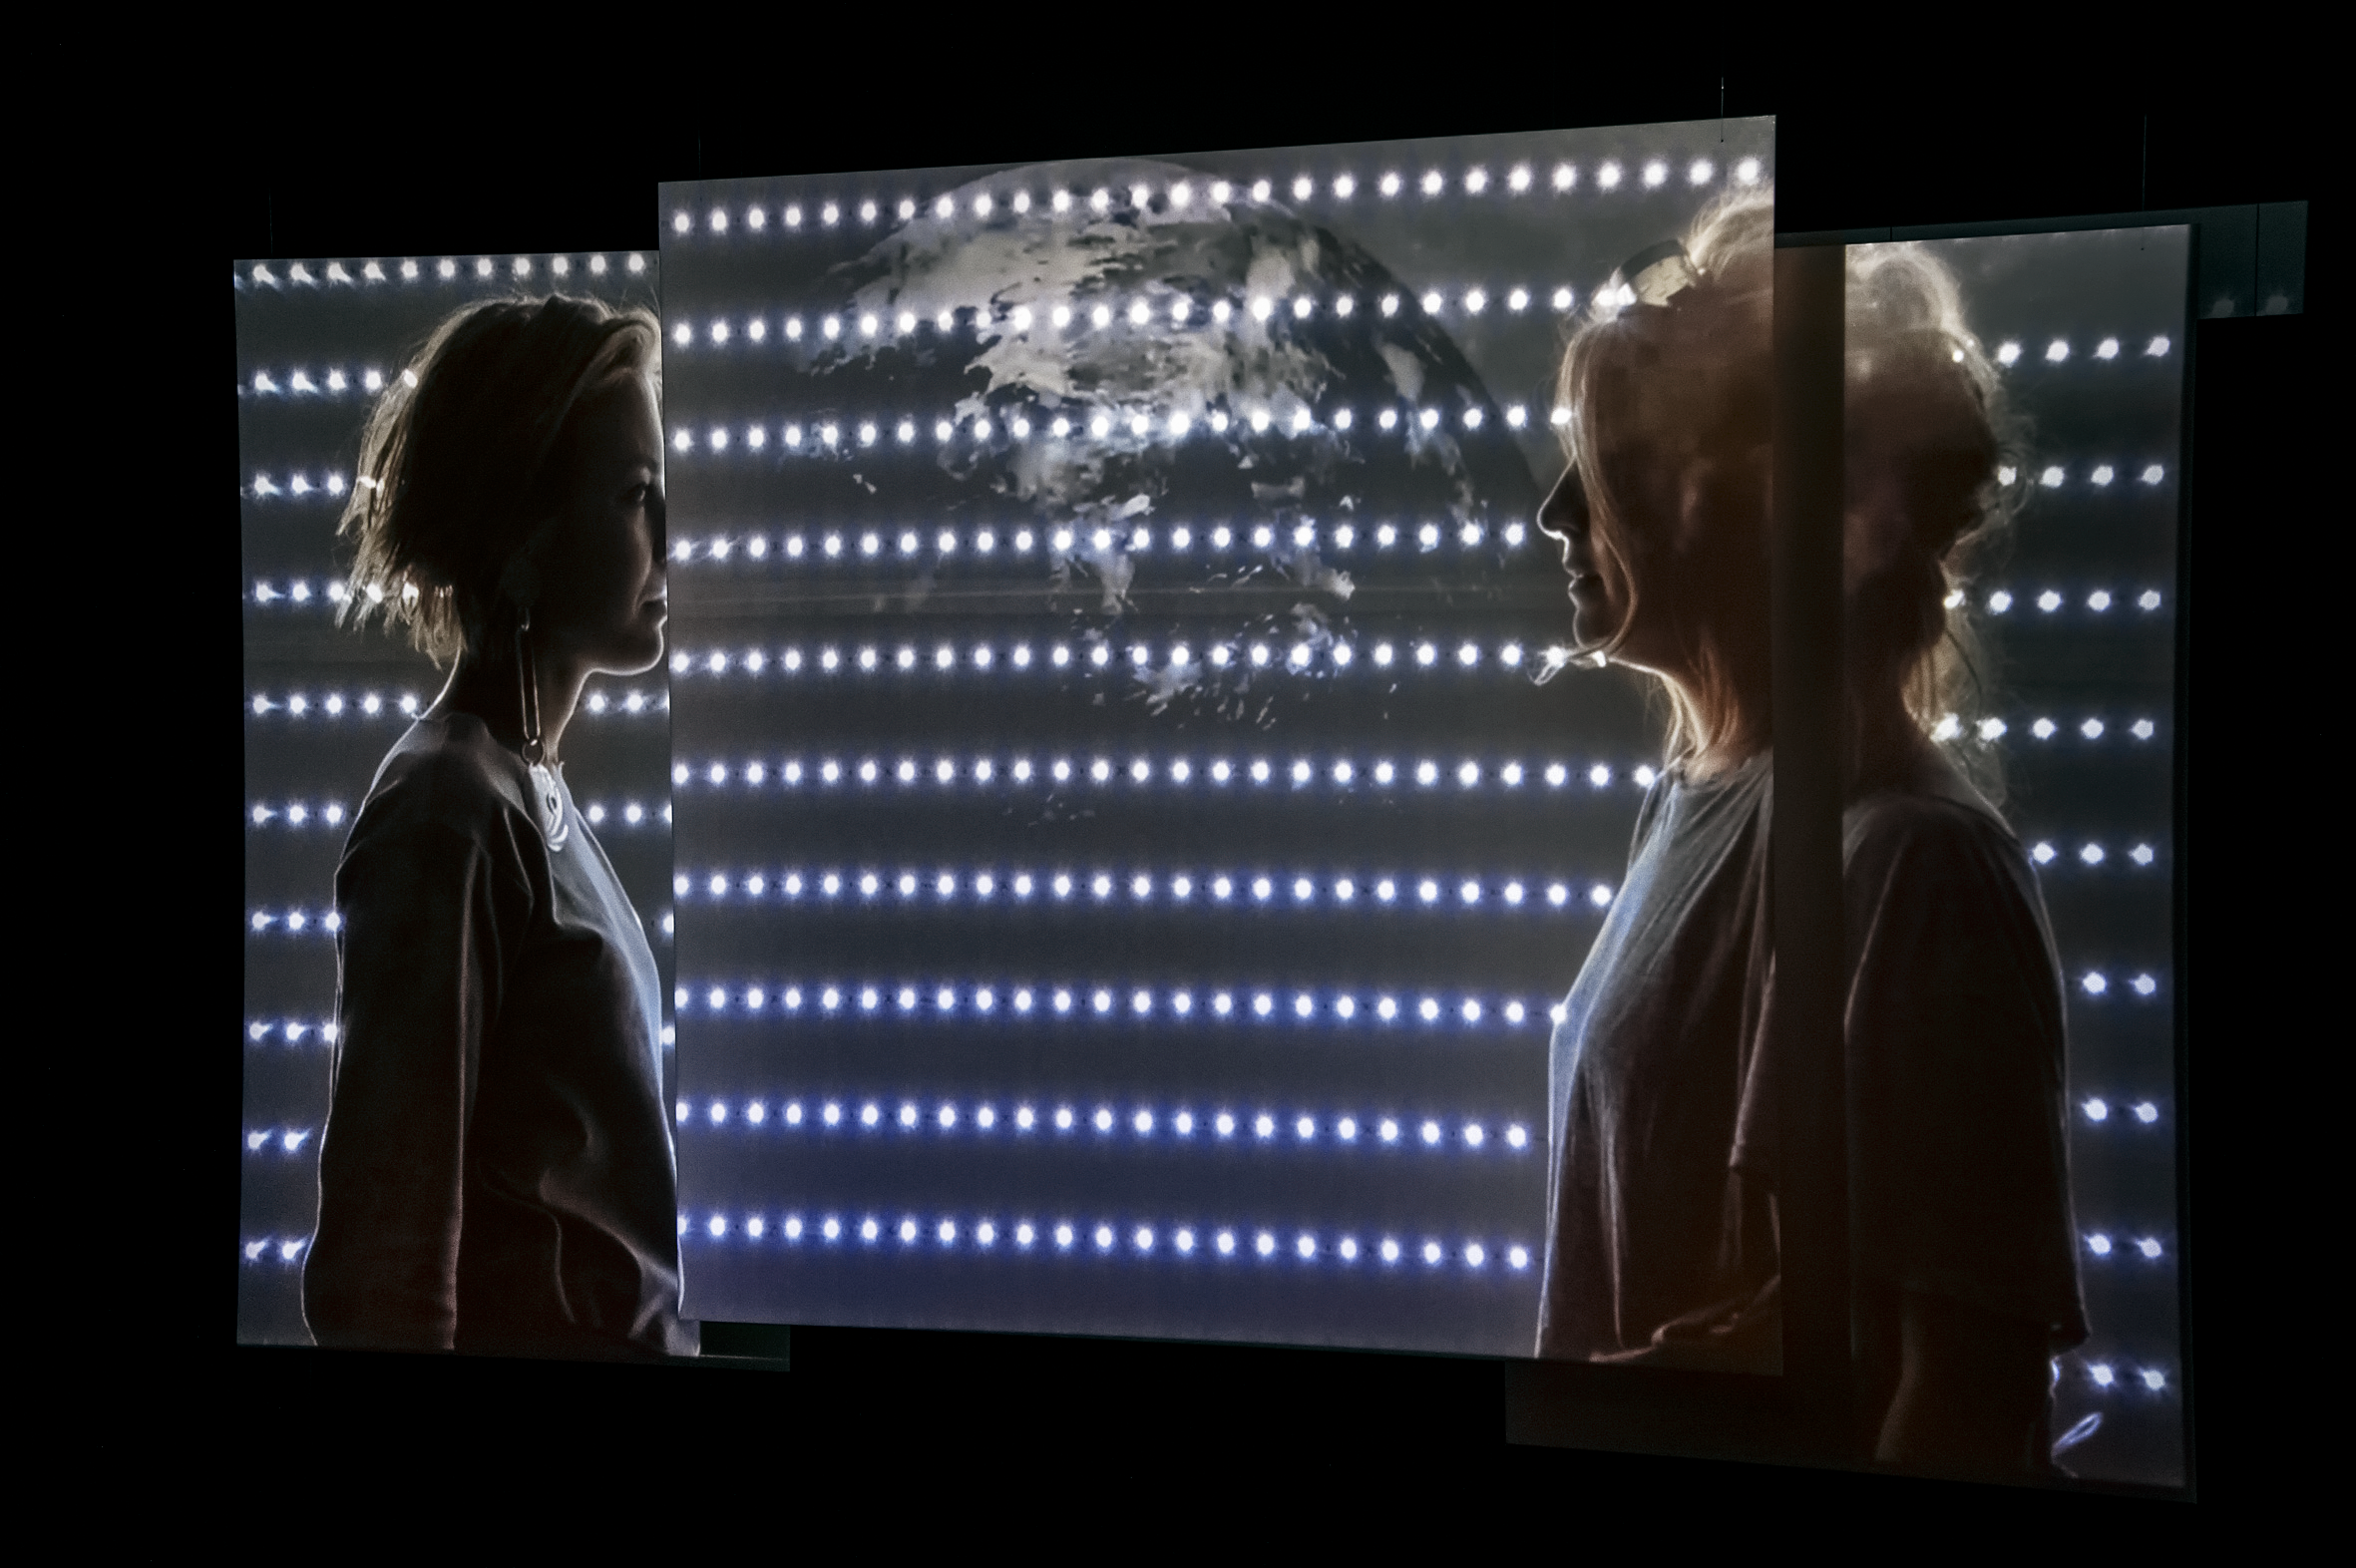

Our Place in Space — Welcome Home Hubble

In the video installation Welcome Home Hubble, created by the artists Eleni Boutsika-Palles and Anna Lerchbaumer the boundaries between fact and fiction become blurred. The installation creates a future in which the Hubble has reached the end of its life. The controlled re-entry into the atmosphere and the details and consequences of this mission served as inspiration for this work.

The video installation stages a speculative narrative in which Hubble is shown as a technological pop star. A look into the future, a few years after its re-entry, follows the surviving parts found on the coast of the Vanuatu Islands. What effects do the fragments have on the site of discovery? What is its economic, cultural and political value?

This installation was created for the Hubble travelling exhibition Our Place in Space in Vienna.

Credit: NHM Wien, Kurt Kracher